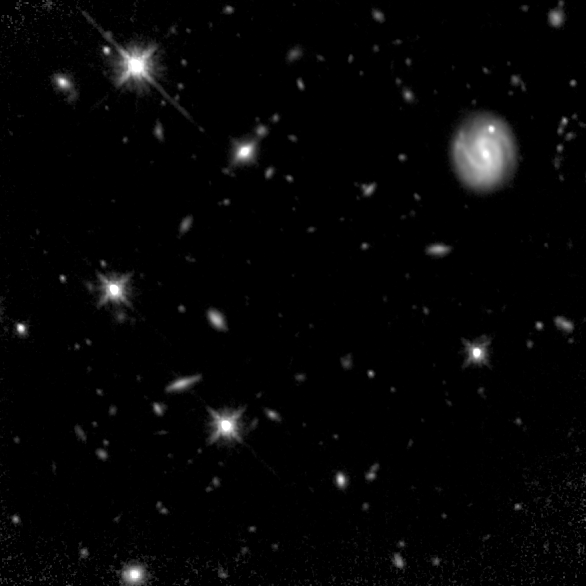

Hubble Deep Field South--Multiple Windows on the Universe

Hubble's Near Infrared and Multi-Object Spectrometer (NICMOS) captures the 'invisible light' coming from stars hidden in dusty galaxies, and galaxies that are so far away their light has been stretched beyond the red end of the visible spectrum.

Credit: R. Williams (STScI), the HDF-S Team, and NASA/ESA